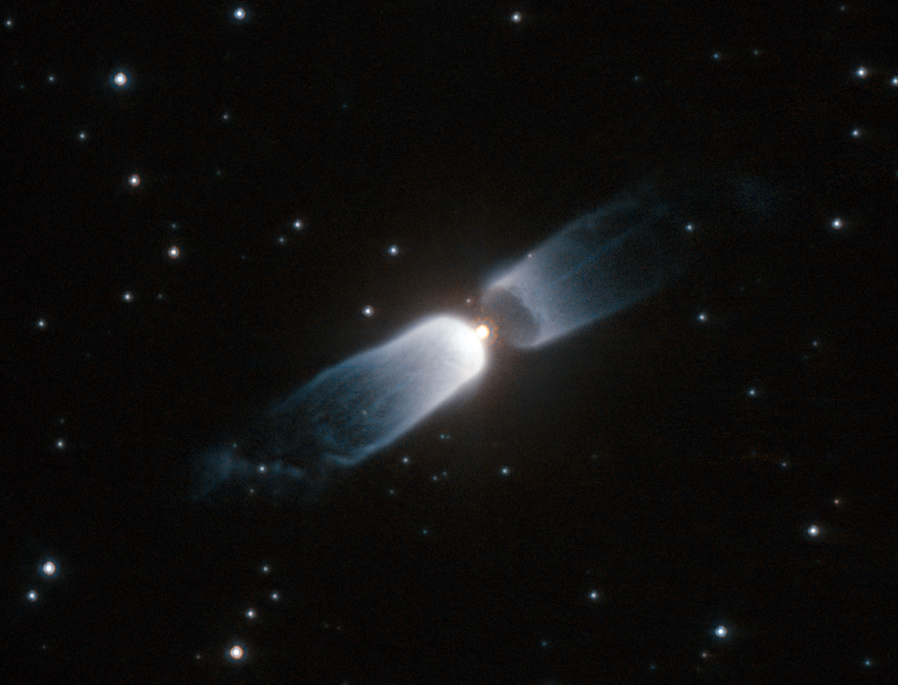

Hubble watches a celestial prologue

The two billowing structures in this NASA/ESA Hubble Space Telescope image of IRAS 13208-6020 are formed from material that is shed by a central star. This is a relatively short-lived phenomenon that gives astronomers an opportunity to watch the early stages of planetary nebula formation, hence the name protoplanetary, or preplanetary nebula. Planetary nebulae are unrelated to planets and the name arose because of the visual similarity between some planetary nebulae and the small discs of the outer planets in the Solar System when viewed through early telescopes.

This object has a very clear bipolar form, with two very similar outflows of material in opposite directions and a dusty ring around the star.

Protoplanetary nebulae do not shine, but are illuminated by light from the central star that is reflected back to us. But as the star continues to evolve, it becomes hot enough to emit strong ultraviolet radiation that can ionise the surrounding gas, making it glow as a spectacular planetary nebula. But before the nebula begins to shine, fierce winds of material ejected from the star will continue to shape the surrounding gas into intricate patterns that can only be truly appreciated later once the nebula begins to glow.

This picture was created from images taken using the High Resolution Channel of Hubble’s Advanced Camera for Surveys. Images taken through an orange filter (F606W, coloured blue) and a near-infrared filter (F814W, coloured red) have been combined to create this picture. The exposure times were 1130 s and 150 s respectively and the field of view is just 22 x 17 arcseconds.

Credit: ESA/Hubble & NASA